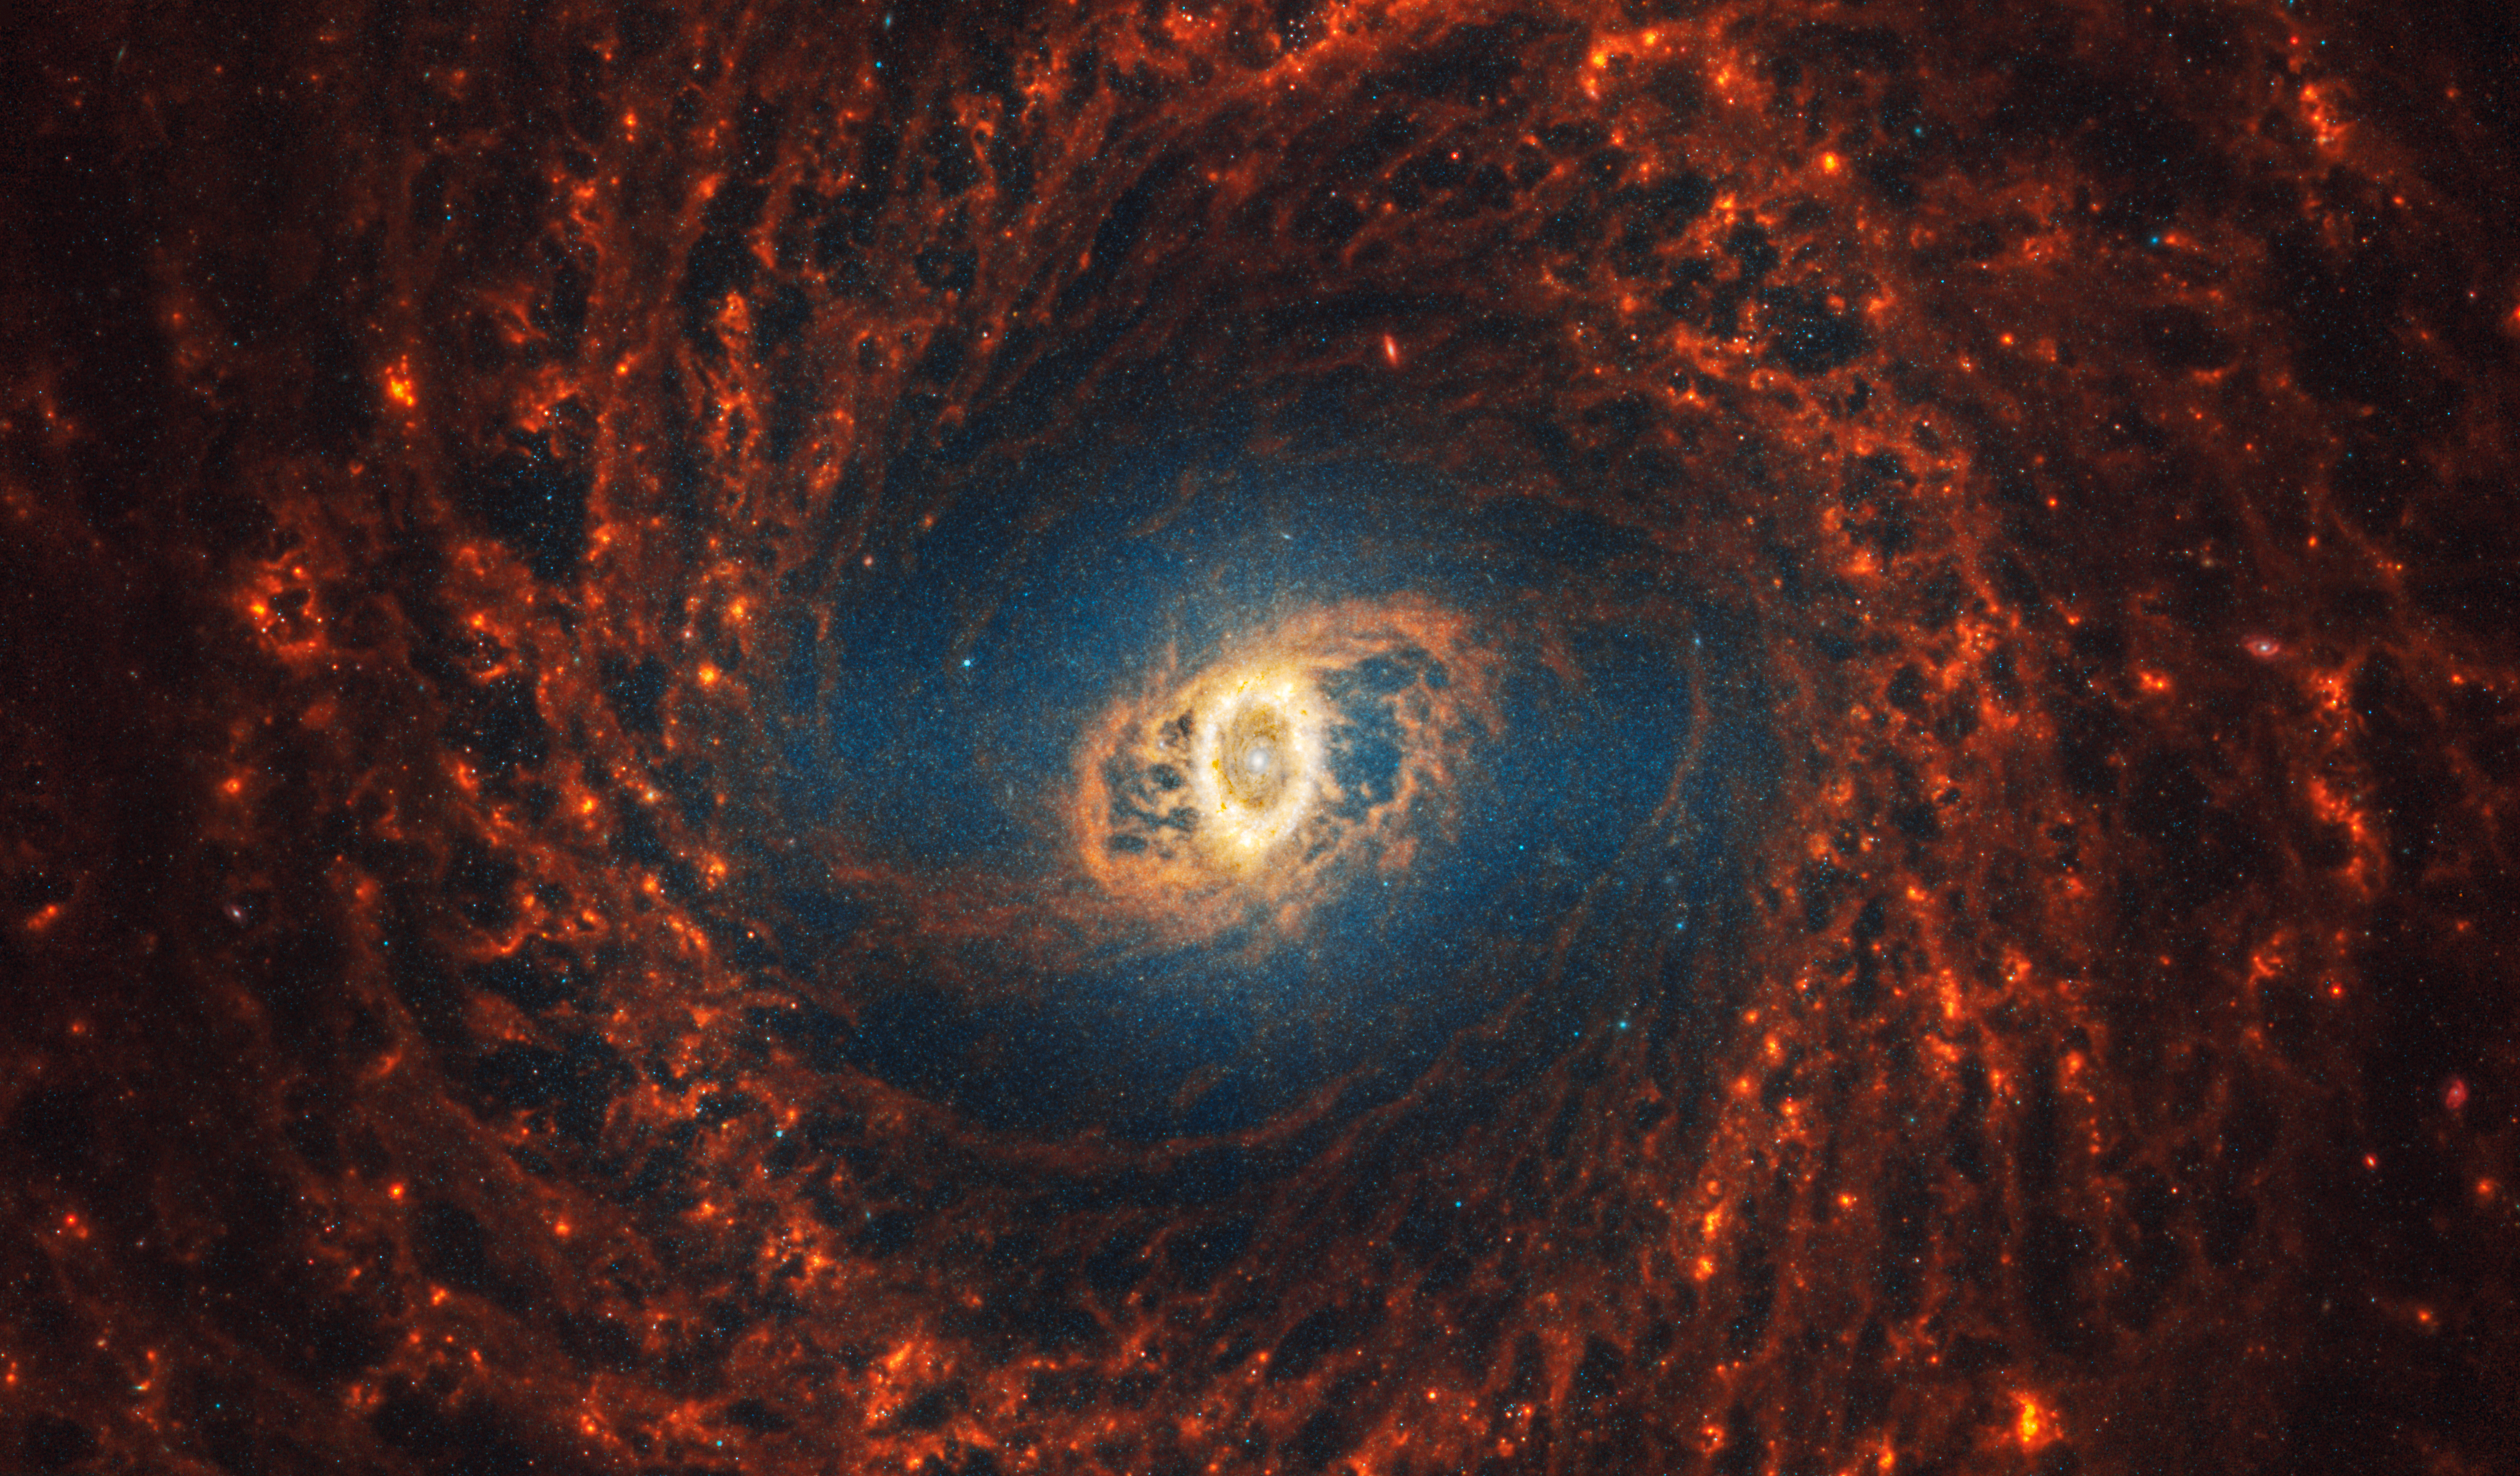

NGC 3351

This spiral galaxy was observed as part of the Physics at High Angular resolution in Nearby GalaxieS (PHANGS) program, a large project that includes observations from several space- and ground-based telescopes of many galaxies to help researchers study all phases of the star formation cycle, from the formation of stars within dusty gas clouds to the energy released in the process that creates the intricate structures revealed by Webb’s new images.

NGC 3351 is 33 million light-years away in the constellation Leo.

Learn more about what can be seen in this vast collection of Webb images here.

Credit: NASA, ESA, CSA, STScI, J. Lee (STScI), T. Williams (Oxford), PHANGS Team